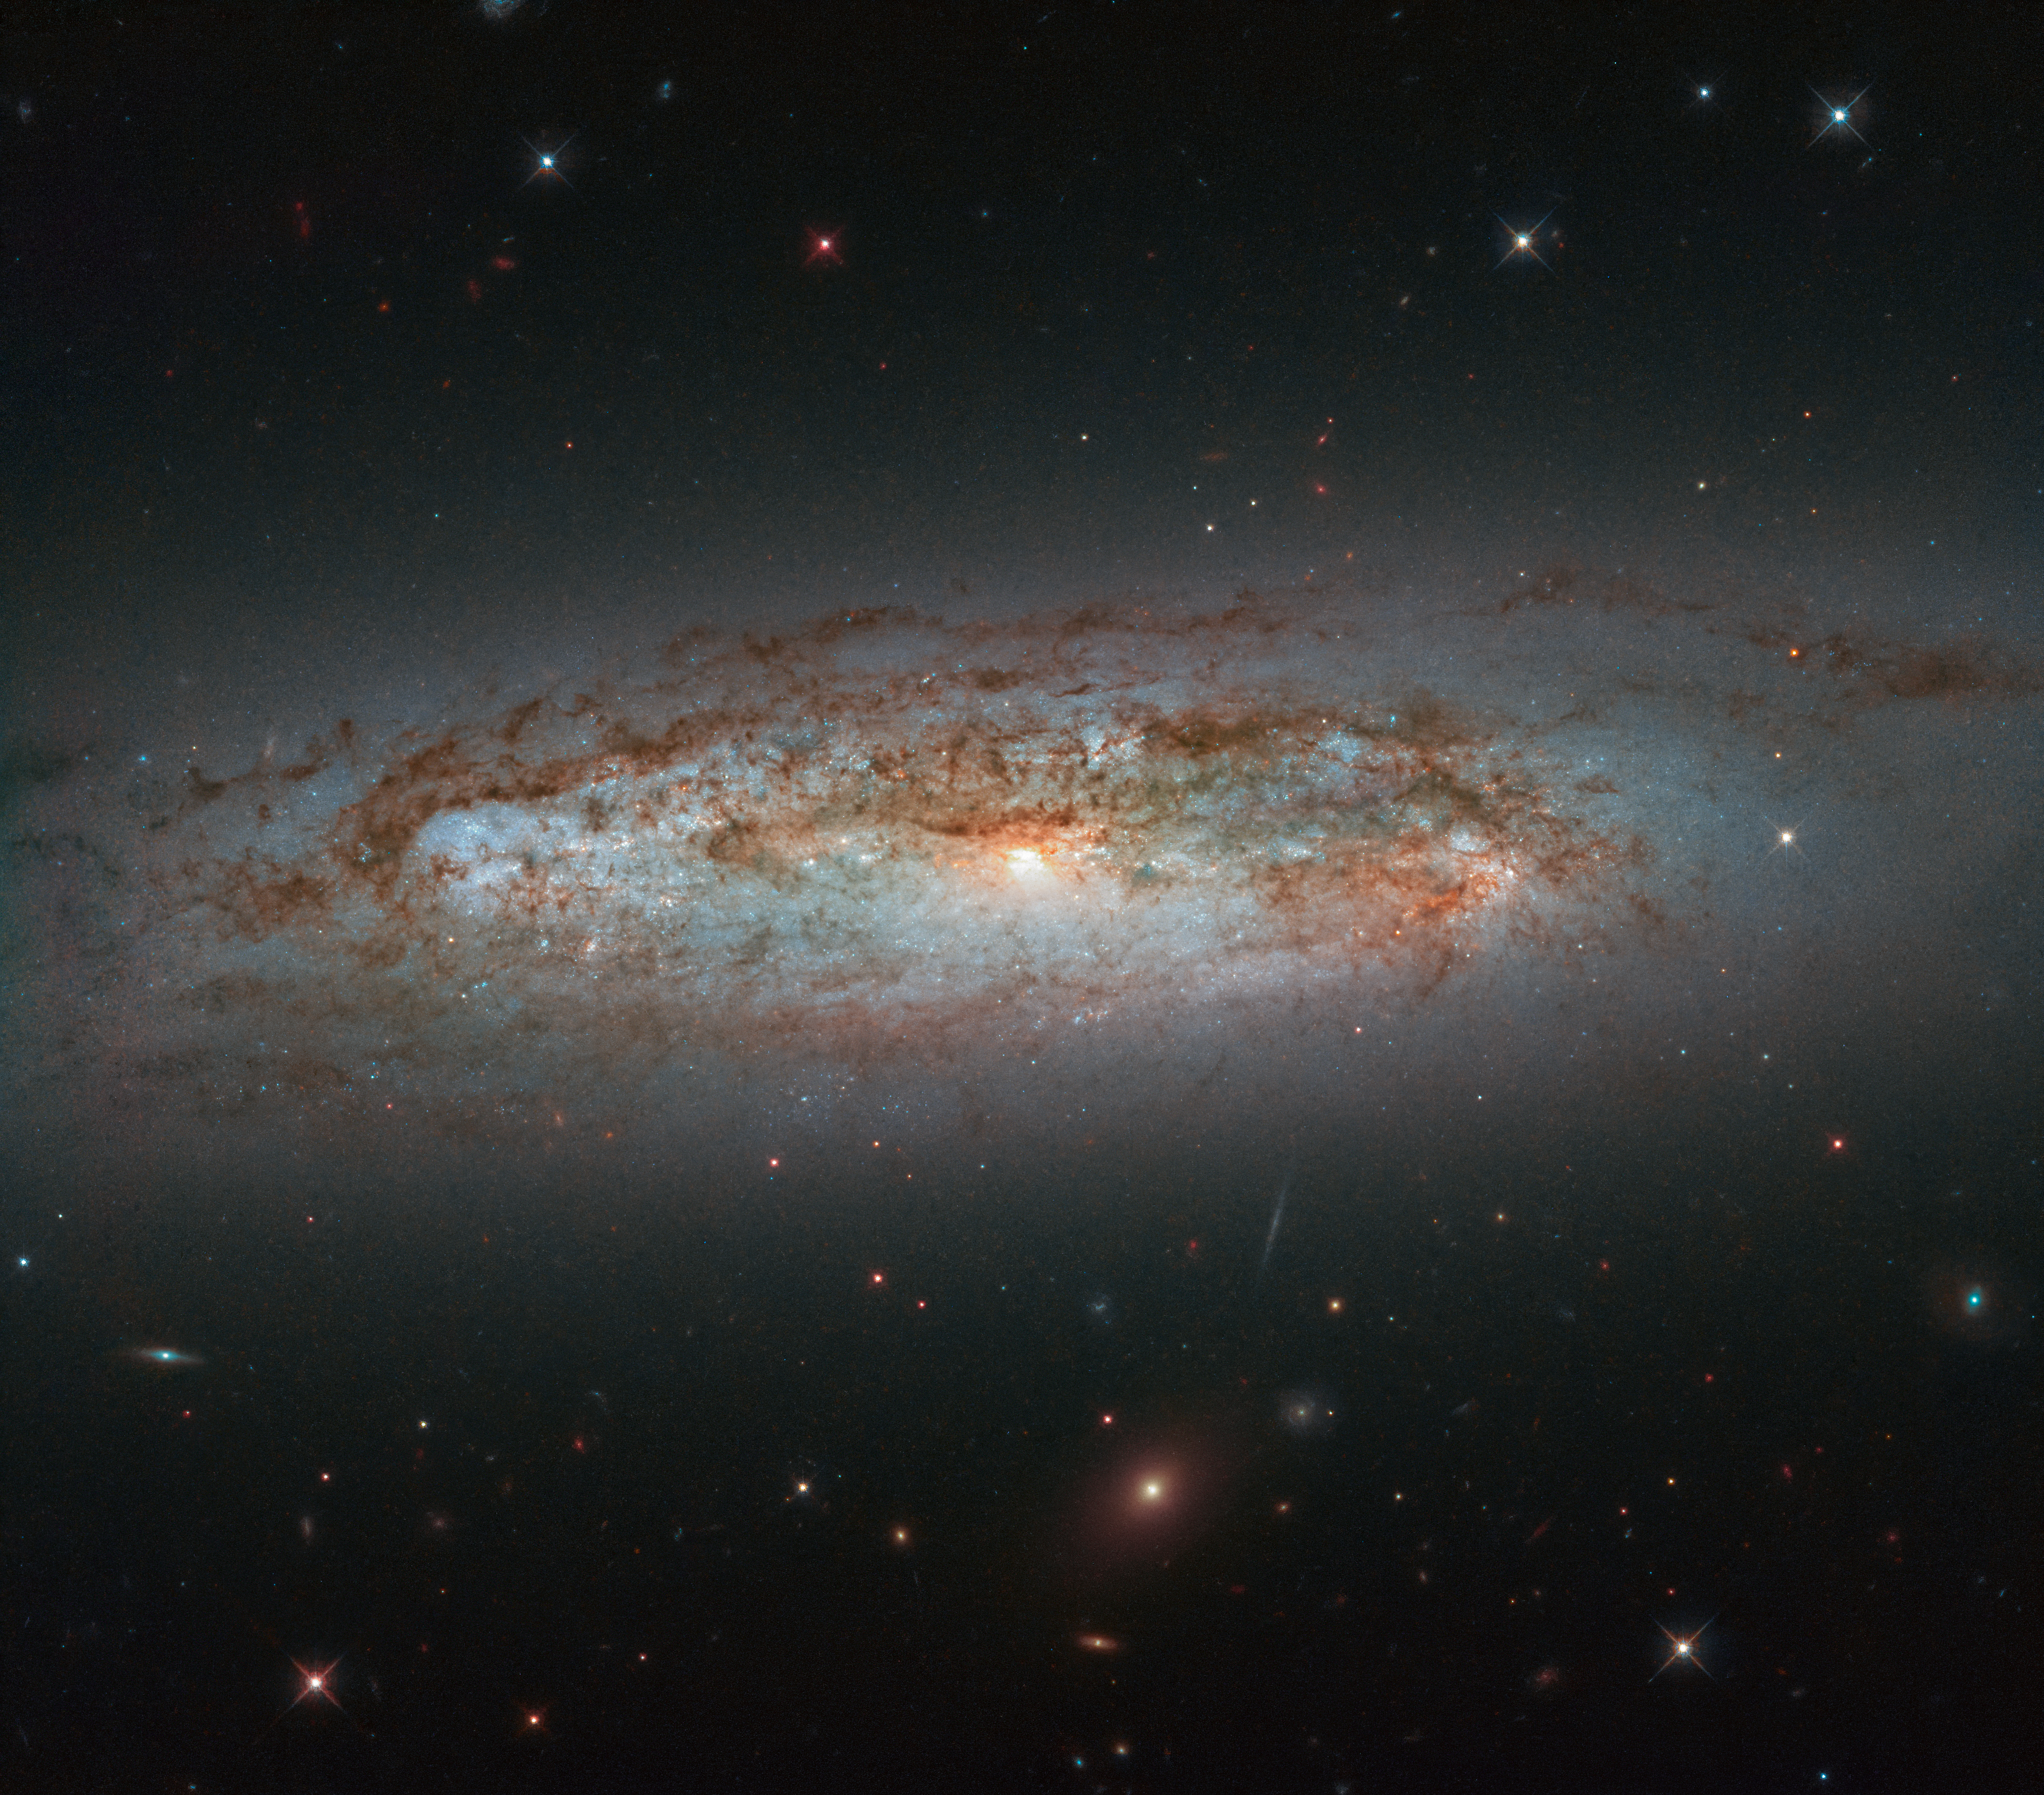

Galactic Diversity

NGC 3175 is located around 50 million light-years away in the constellation of Antlia (The Air Pump). The galaxy can be seen slicing across the frame in this image from the NASA/ESA Hubble Space Telescope, with its mix of bright patches of glowing gas, dark lanes of dust, bright core, and whirling, pinwheeling arms coming together to paint a beautiful celestial scene.

The galaxy is the eponymous member of the NGC 3175 group, which has been called a nearby analogue for the Local Group. The Local Group contains our very own home galaxy, the Milky Way, and around 50 others — a mix of spiral, irregular, and dwarf galaxies. The NGC 3175 group contains a couple of large spiral galaxies — the subject of this image, and NGC 3137 — and numerous lower-mass spiral and satellite galaxies. Galaxy groups are some of the most common galactic gatherings in the cosmos, and they comprise 50 or so galaxies all bound together by gravity.

This image comprises observations from Hubble’s Wide Field Camera 3.

Credit: ESA/Hubble & NASA, D. Rosario et al.